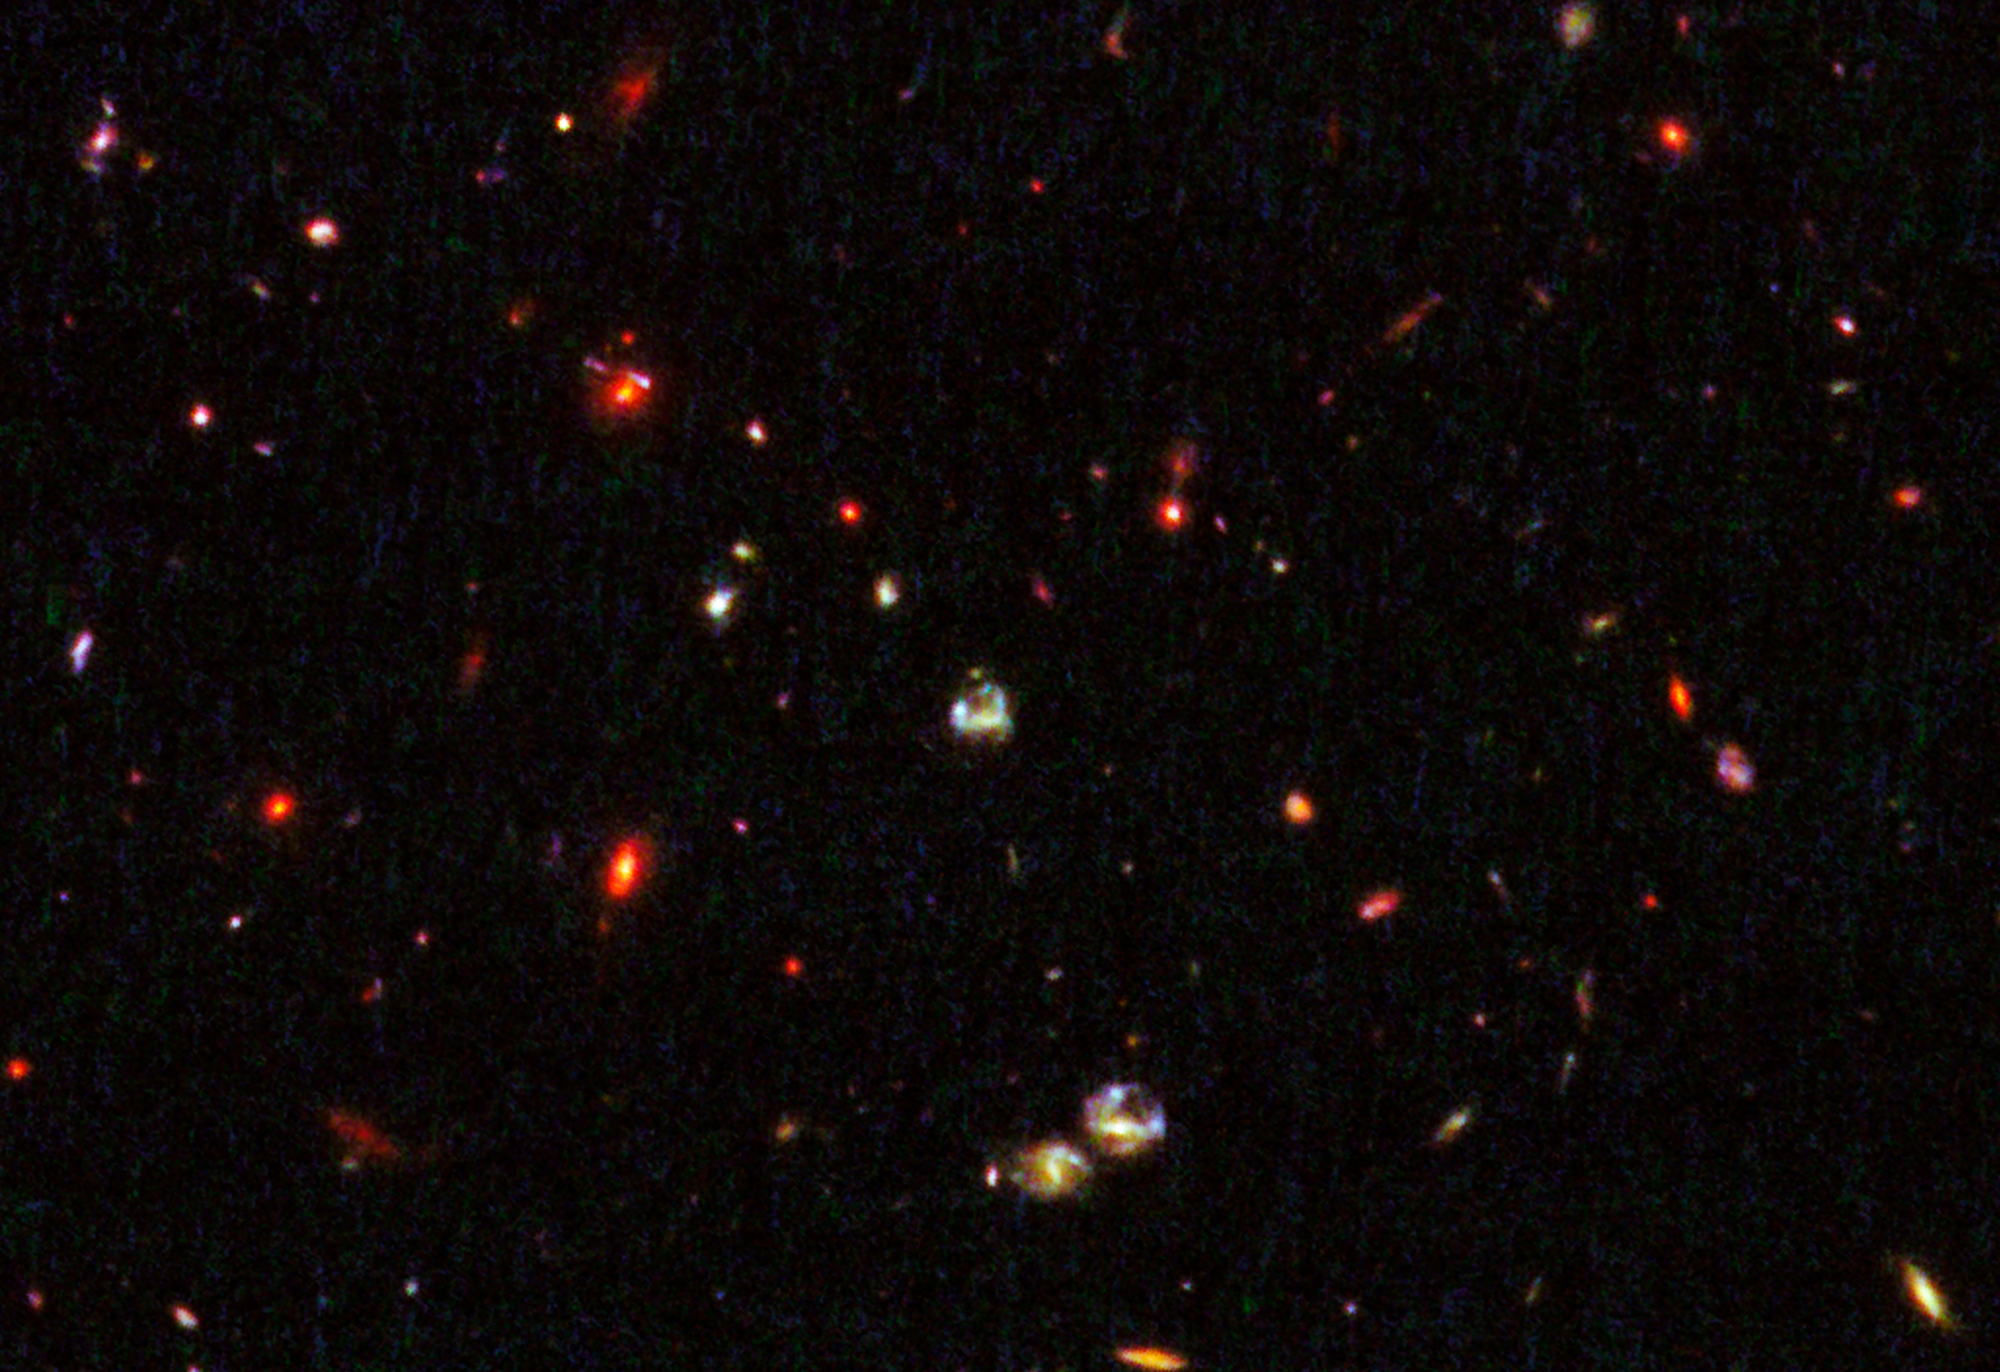

Gravitational lensing by galaxy in cluster IRC 0218

This NASA/ESA Hubble Space Telescope image reveals the most distant cosmic lens yet found, a massive elliptical galaxy whose powerful gravity is magnifying the light from a faraway galaxy behind it.

The giant elliptical is one of the red objects in the top left of the image, identified in the annotated version.

The galaxy is seen as it appeared 9.6 billion years ago and is one of the brightest members in a distant cluster of galaxies, called IRC 0218. It is so massive that its enormous gravitational field deflects light passing through it, much as an optical lens bends light to form an image. This phenomenon, called gravitational lensing, magnifies, brightens, and distorts images from faraway objects that might otherwise be too faint to observe even with the largest telescopes.

The image was made by combining visible-light observations from the Advanced Camera for Surveys and near-infrared exposures from the Wide Field Camera 3.

Credit: NASA, ESA, K.-V. Tran (Texas A&M University), and K. Wong (Academia Sinica Institute of Astronomy & Astrophysics)